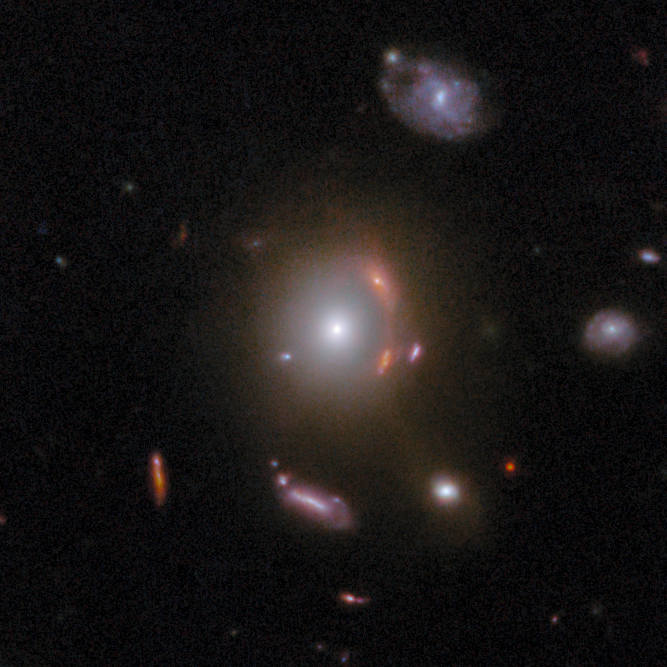

Gravitational lens COSJ095593+023319

The glowing elliptical galaxy at the centre of this image is about 8.6 billion light-years away. This gravitational lens is ideally suited for the study of dark matter, an invisible form of matter that makes up most of the mass in the Universe.

This gravitational lens is one of eight featured in the September 2025 Picture of the Month.

Credit: ESA/Webb, NASA & CSA, G. Gozaliasl, A. Koekemoer, M. Franco